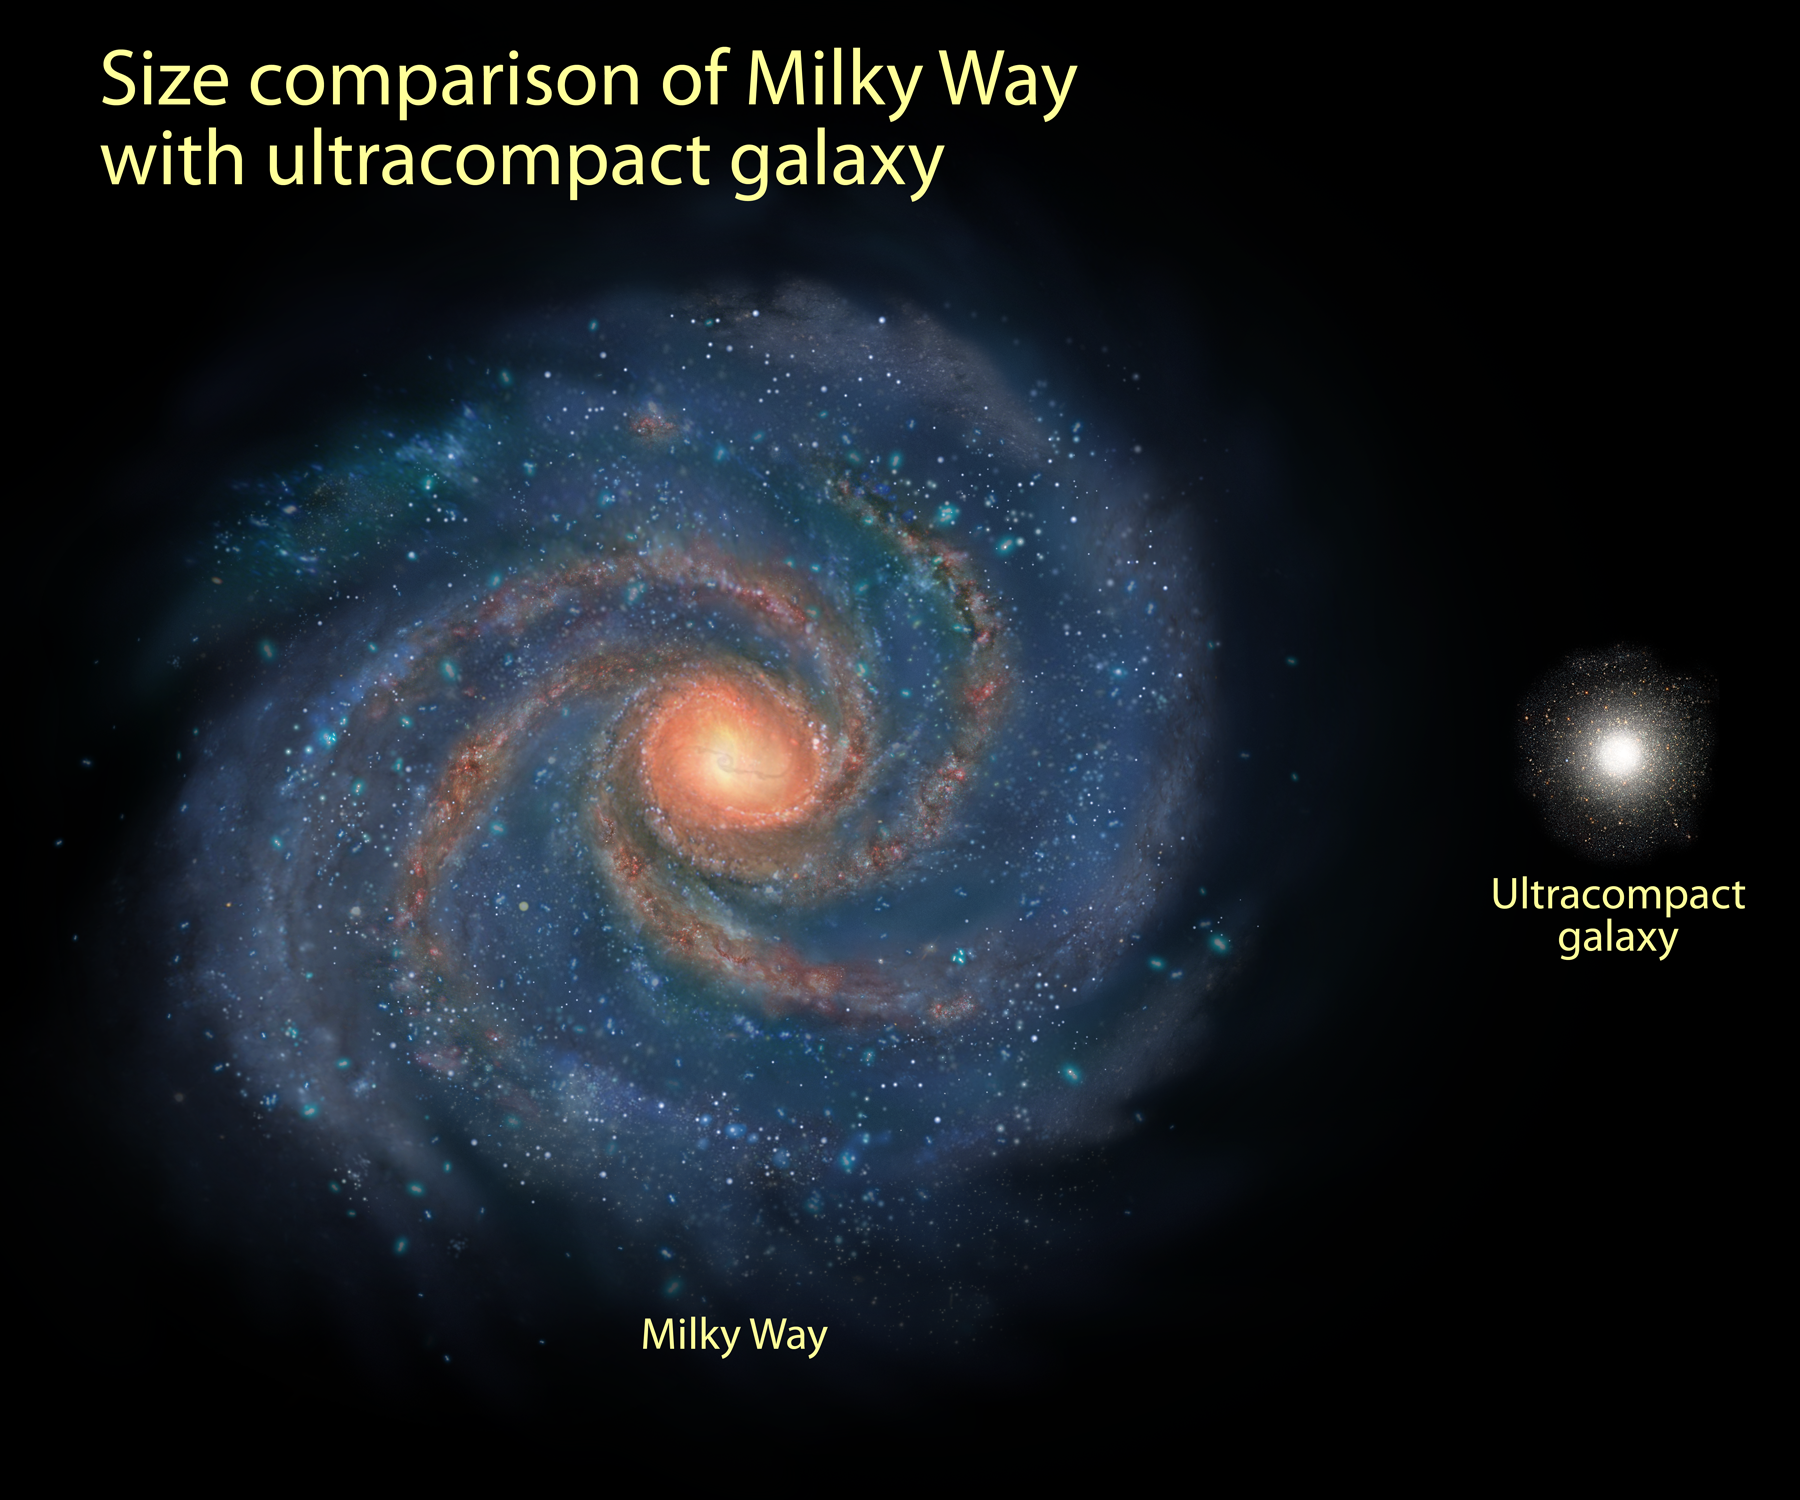

Comparison of Milky Way and compact galaxy

Illustration showing a comparison of the sizes of the Milky Way and one of nine compact galaxies found with Hubble and Keck.

Credit: NASA, ESA and A. Feild (STScI)